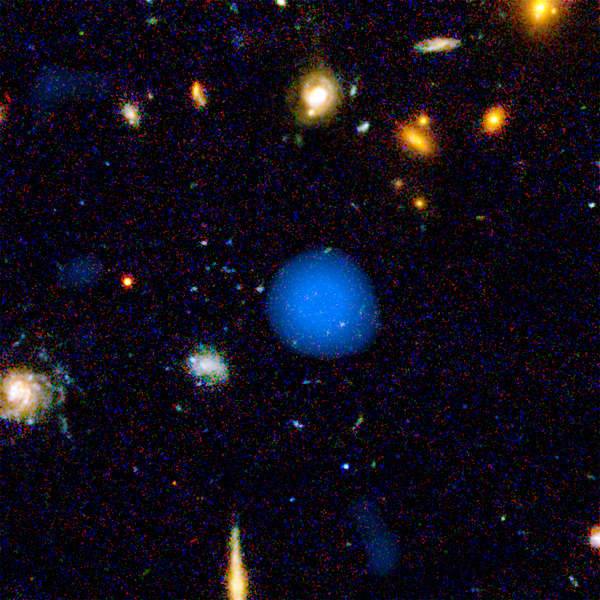

Hubble+Chandra: Object #3 53.057987-27.833524

The combined power of NASA's Great Observatories - the Hubble Space Telescope, the Chandra X-ray Observatory, and the Spitzer Space Telescope - have been combined to find a hidden population of supermassive black holes in the universe. It took the penetrating view of Spitzer to finally uncover the black holes and their surrounding galaxies.

Credit: NASA, ESA, A. M. Koekemoer (STScI), M. Dickinson (NOAO) and The GOODS Team